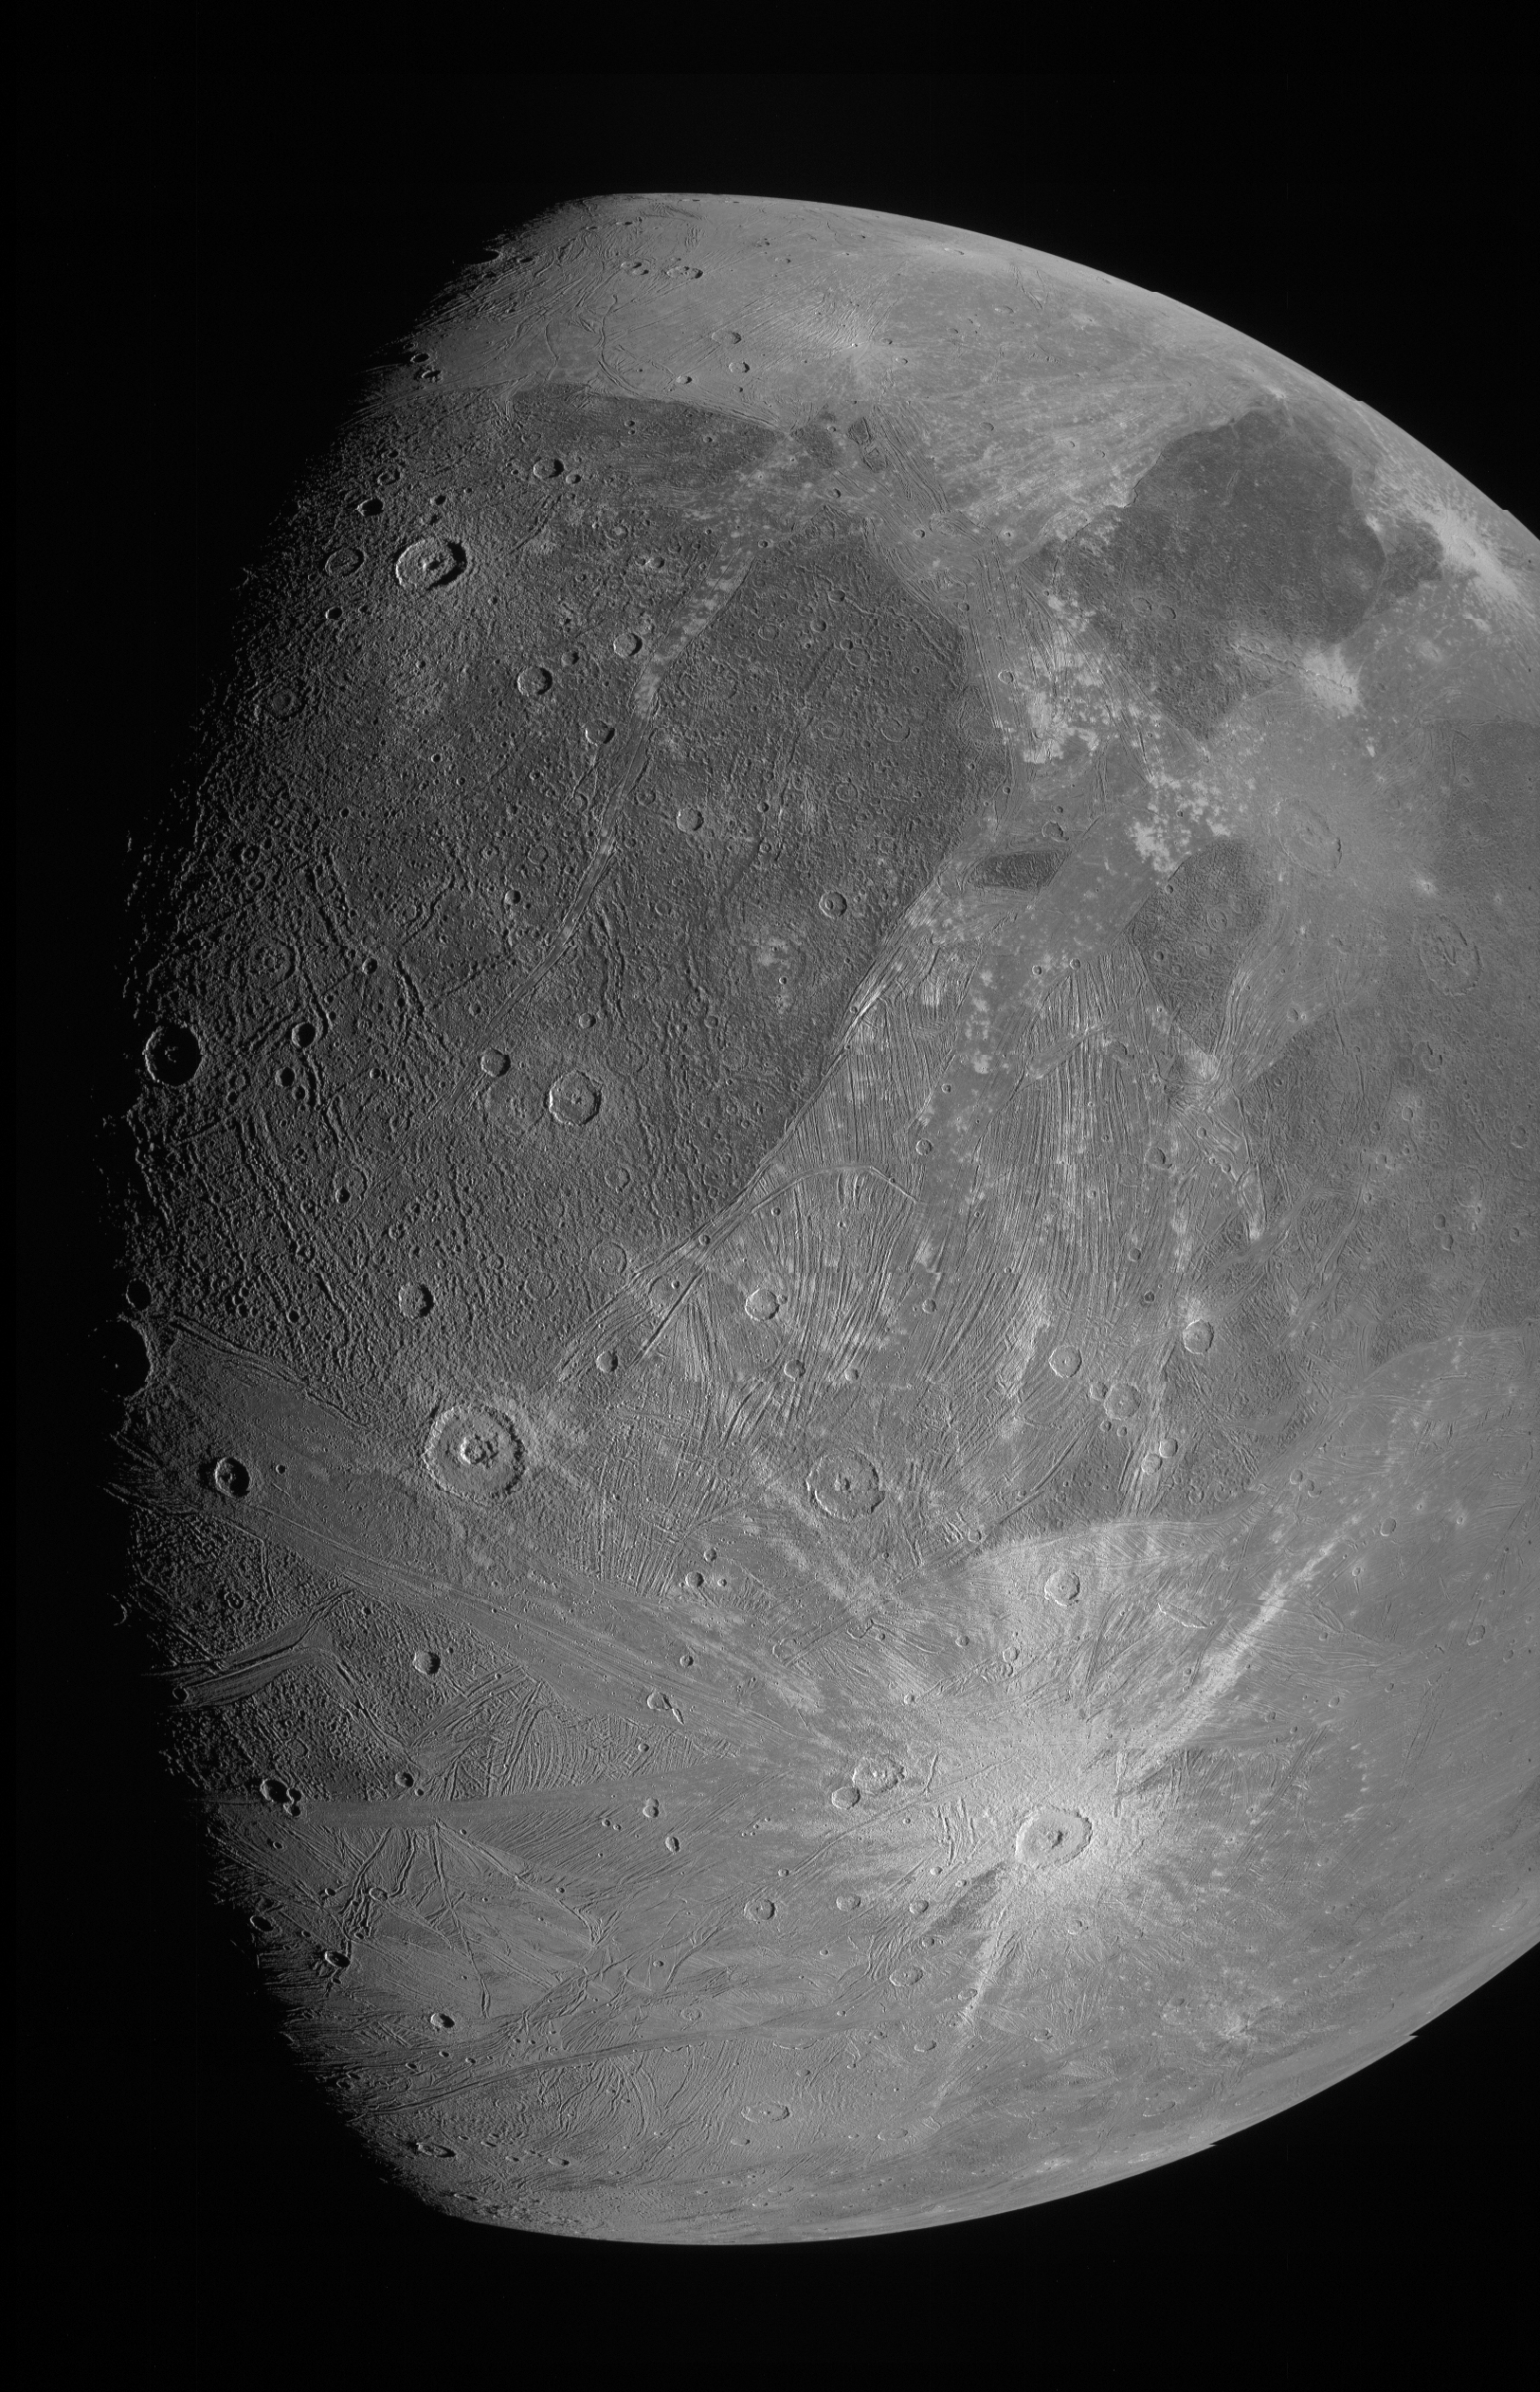

NASA’s Juno Spacecraft Observation of Ganymede in June 2021

This image of Ganymede was obtained by NASA's Juno Spacecraft JunoCam imager during a flyby of the icy moon on 7 June 2021.

Credit: NASA/JPL-Caltech/SwRI/MSSS